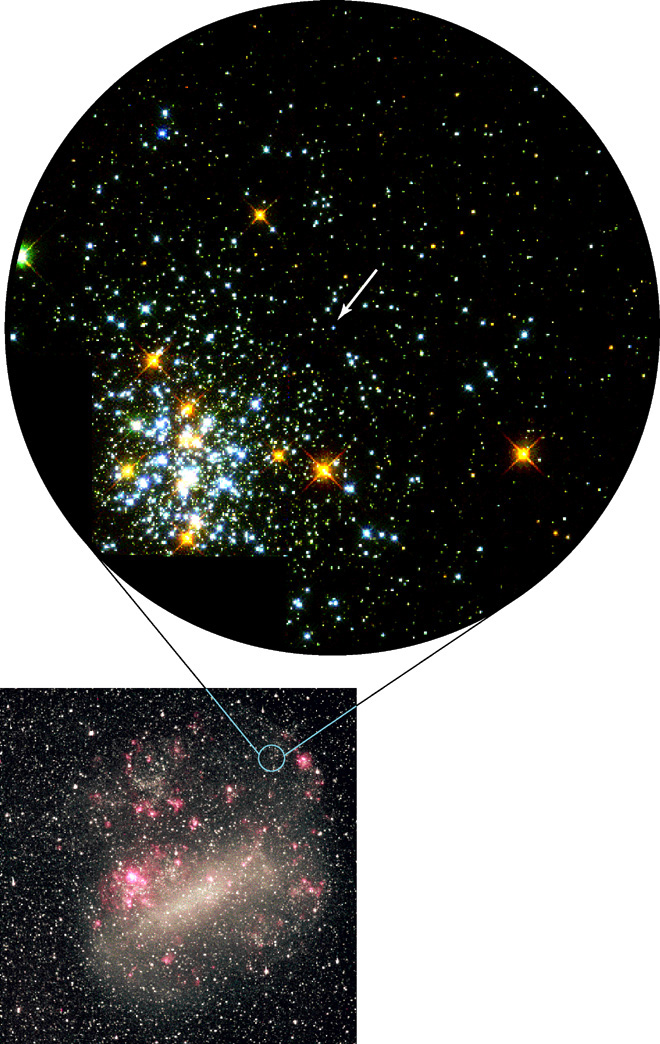

Hot White Dwarf Shines in Young Star Cluster

Ground-based image of the Large Magellanic Cloud with the location of the HST/WFPC2 field indicated.

Credit: Rebecca Elson and Richard Sword, Cambridge UK, and NASA/ESA (Original WFPC2image courtesy J. Westphal, Caltech)